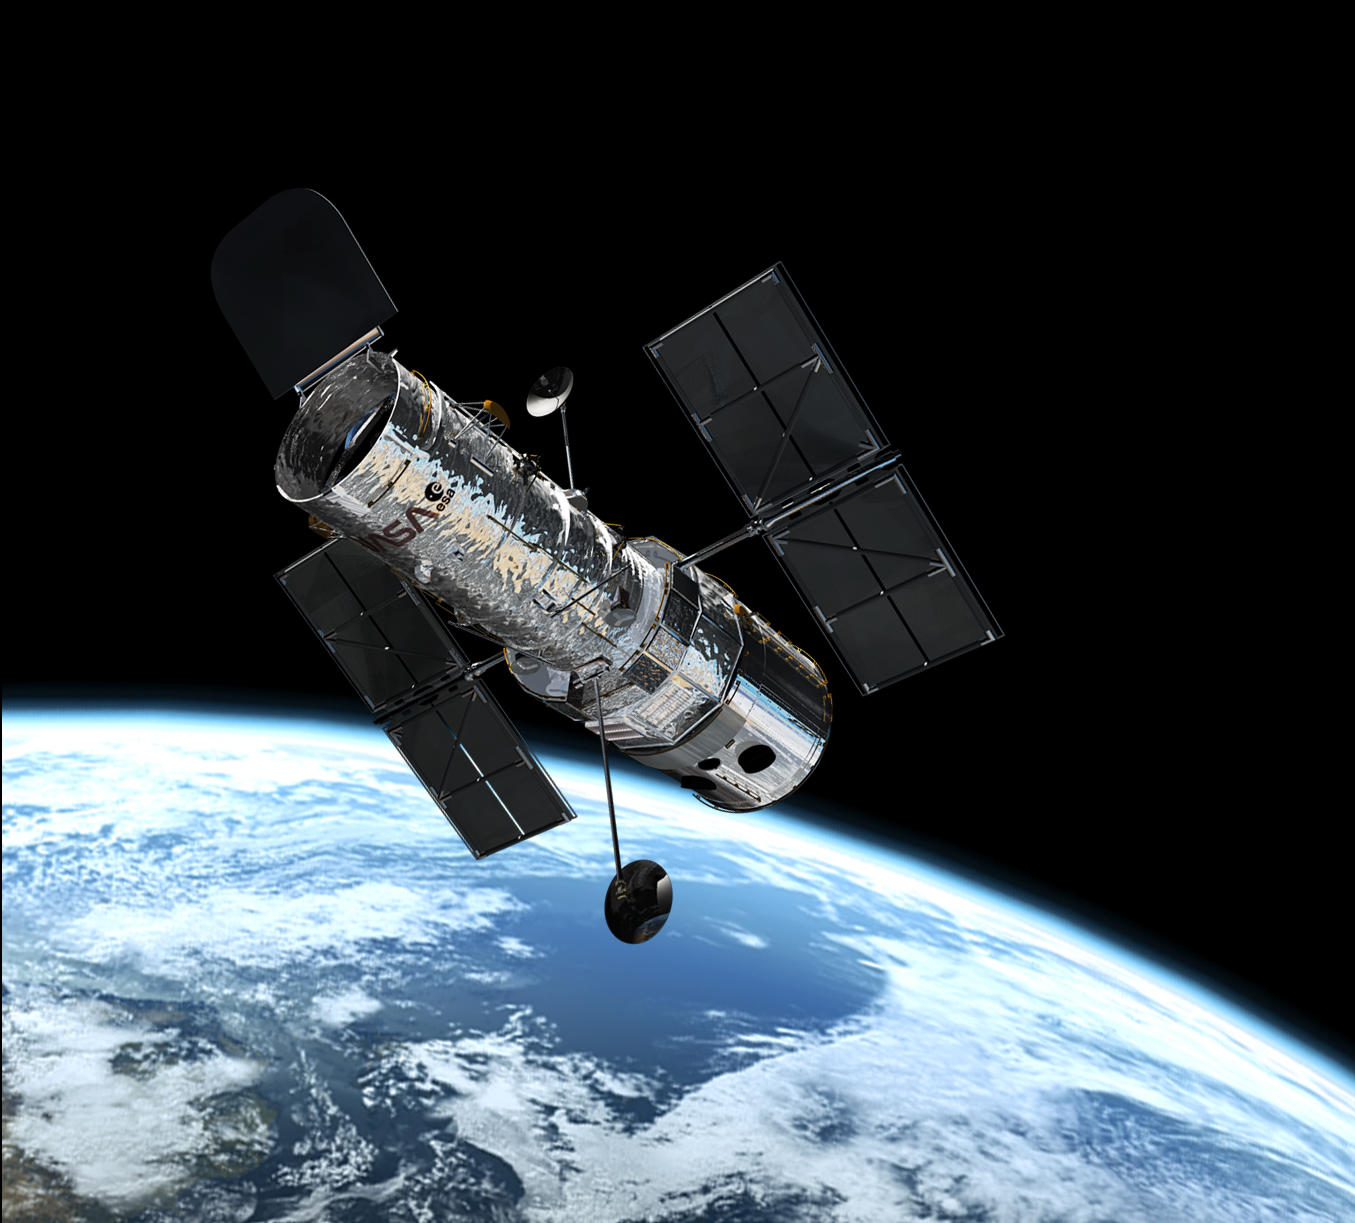

Hubble in orbit

This illustration shows the NASA/ESA Hubble Space Telescope in its high orbit 600 kilometres above Earth.

Credit: European Space Agency